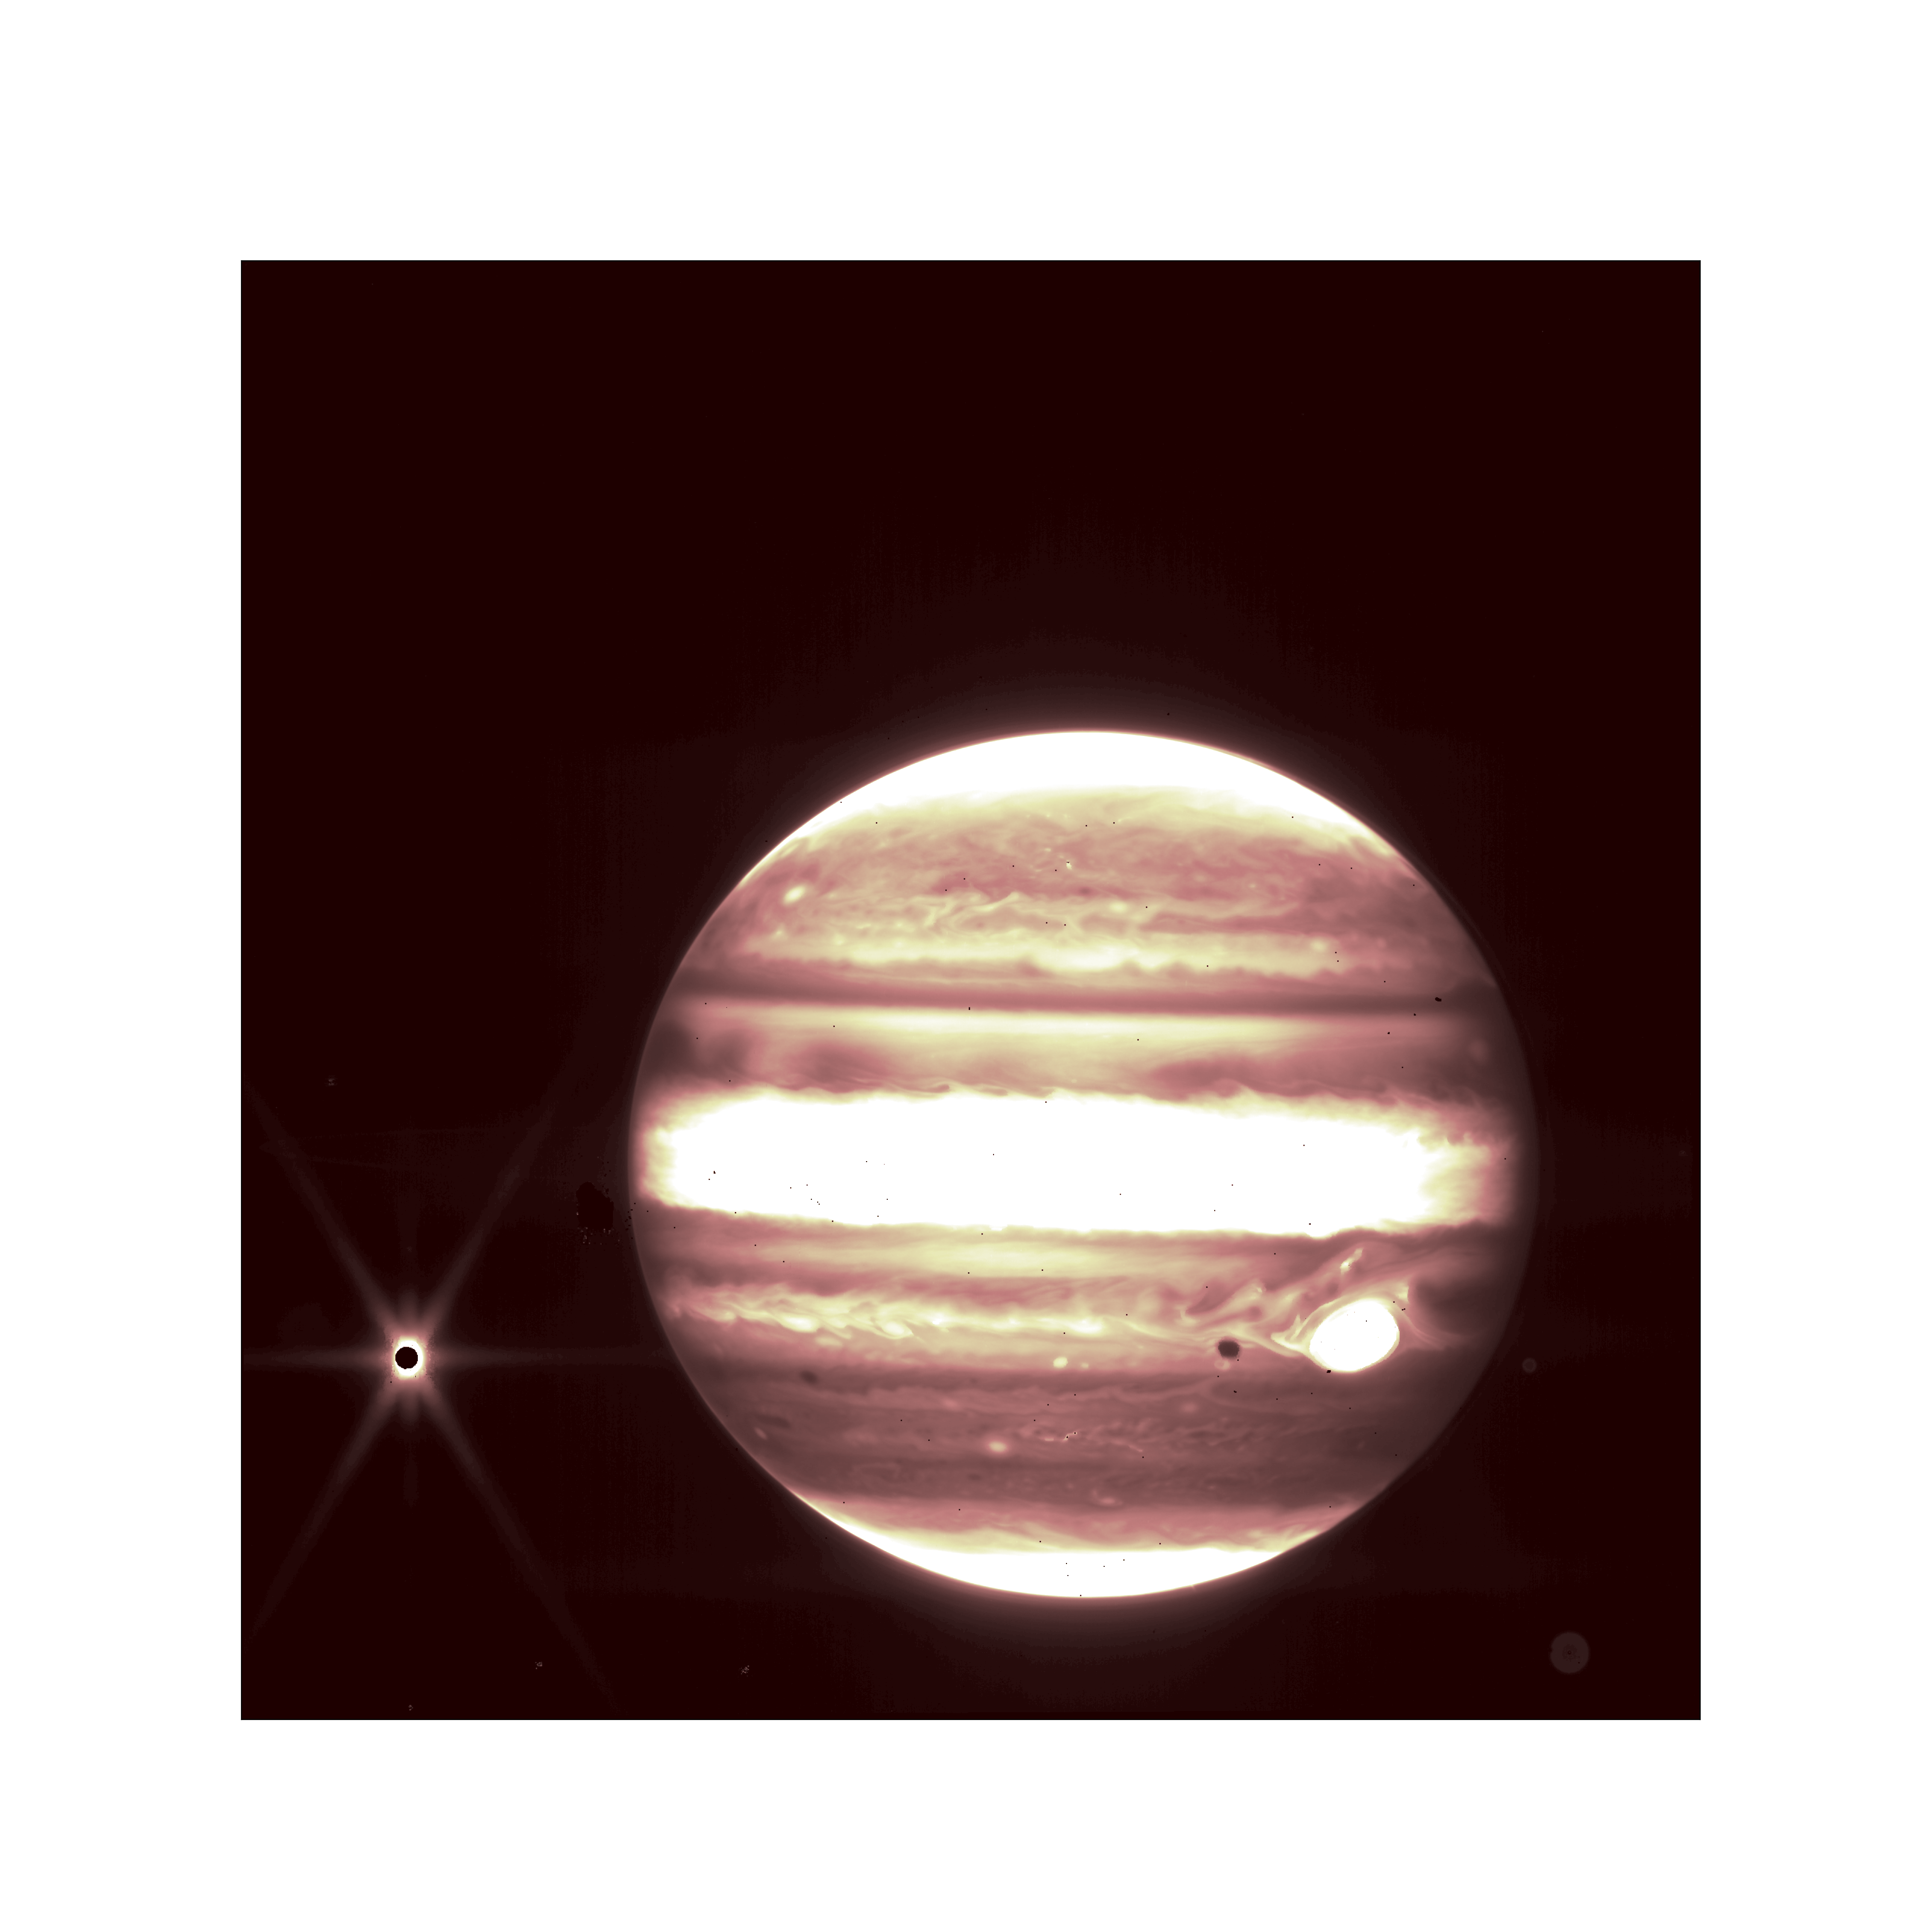

Jupiter and Europa (NIRCam) Commissioning Image

In this infrared image from the NASA/ESA/CSA James Webb Space Telescope, Jupiter is shown with its moon Europa (left), as seen by the NIRCam instrument 2.12 micron filter. The short-wavelength filter shows distinct bands that encircle the planet.

The Great Red Spot appears white on the right. The iconic spot appears white in this image because of the way Webb’s infrared image was processed. The dark spot to the left of the Great Red Spot is Europa’s shadow cast on Jupiter.

Scientists were especially eager to see these commissioning images because they are proof that Webb can observe the satellites and rings near bright solar system objects such as Jupiter, Saturn, and Mars. Scientists will use Webb to explore the tantalizing question of whether we can see plumes of material spewing out of moons like Europa and Saturn’s moon Enceladus. Webb may be able to see the signatures of plumes depositing material on the surface on Europa.

Credit: NASA/ESA/CSA/STScI